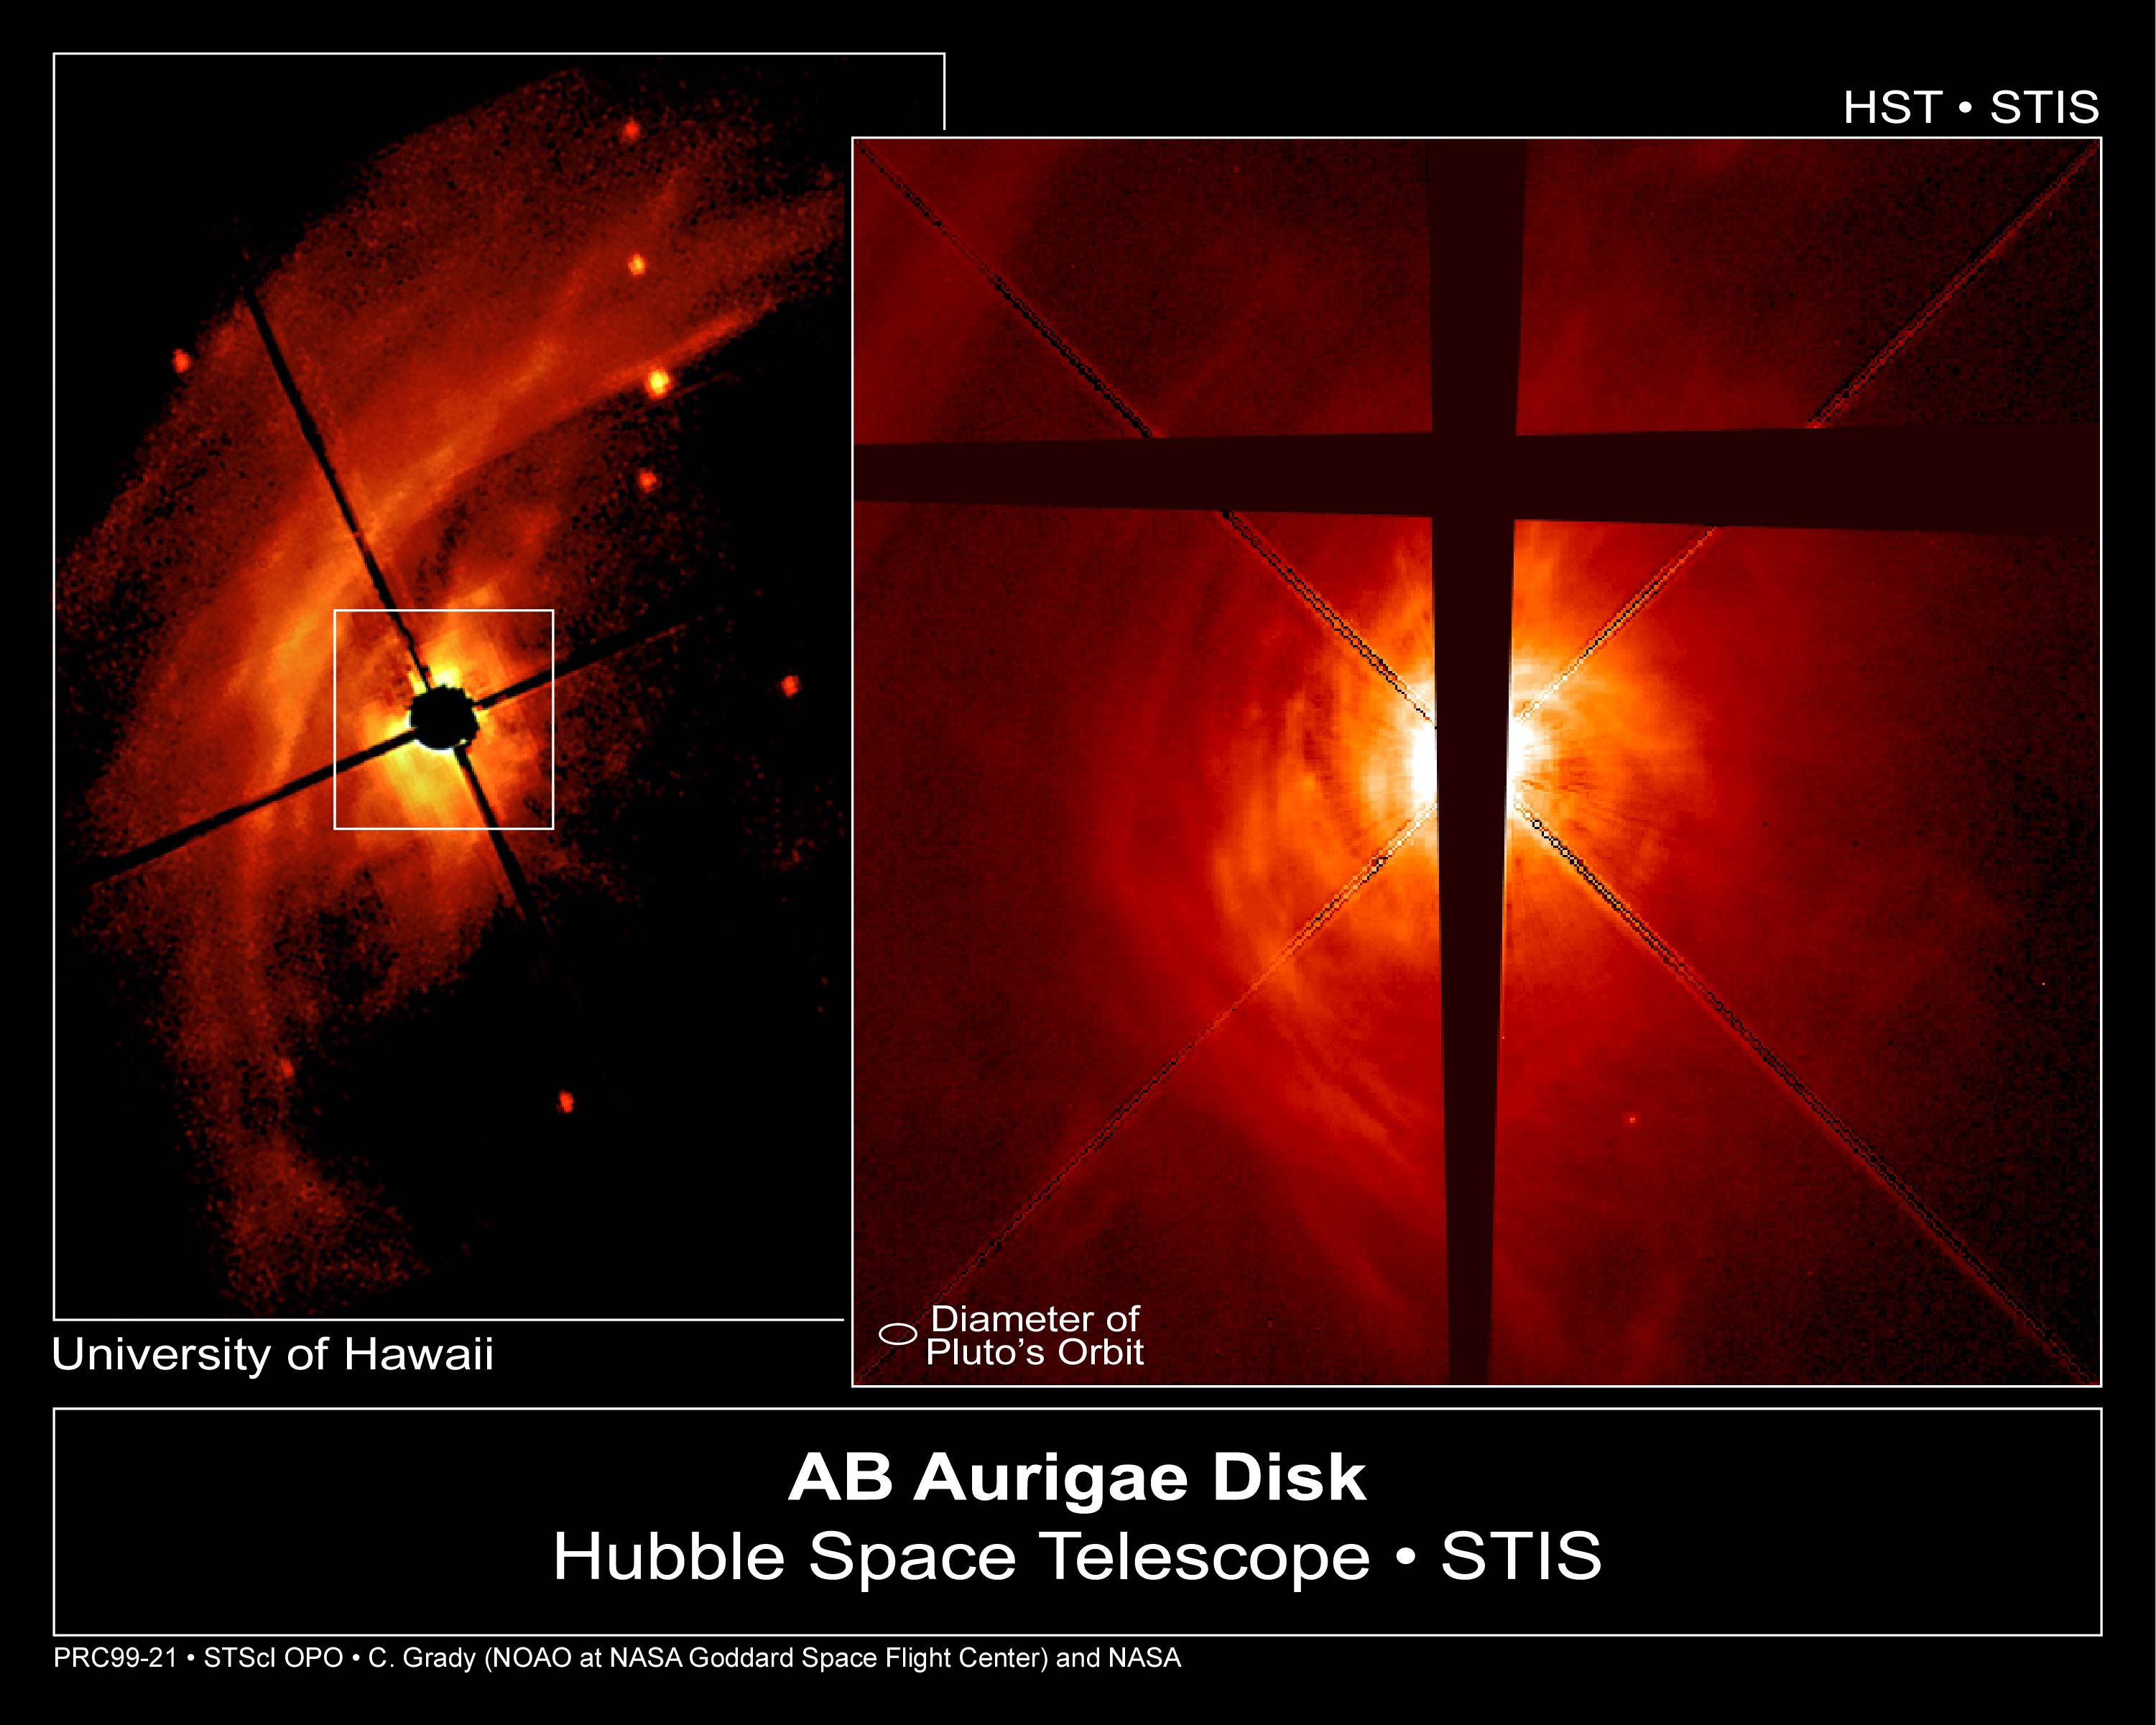

AB Aurigae Disk (Hubble and ground-based view)

The NASA/ESA Hubble Space Telescope has snapped a nearly face-on view of a swirling disk of dust and gas surrounding a developing star called AB Aurigae. The Hubble telescope image, taken in visible light by the Space Telescope Imaging Spectrograph, shows unprecedented detail in the disk, including clumps of dust and gas that may be the seeds of planet formation.

Normally, a young star's bright light prevents astronomers from seeing material closer to it. That's why astronomers used a coronograph in these two images of AB Aurigae to block most of the light from the star. The rest of the disk material is illuminated by light reflected from the gas and dust surrounding the star.

Credit: C.A. Grady (National Optical Astronomy Observatories, NASA/ESA Goddard Space Flight Center), B. Woodgate (NASA/ESA Goddard Space Flight Center), F. Bruhweiler and A. Boggess (Catholic University of America), P. Plait and D. Lindler (ACC, Inc., Goddard Space Flight Center), M. Clampin ( Space Telescope Science Institute), and NASA/ESA, P. Kalas (SpaceTelescope Science Institute)